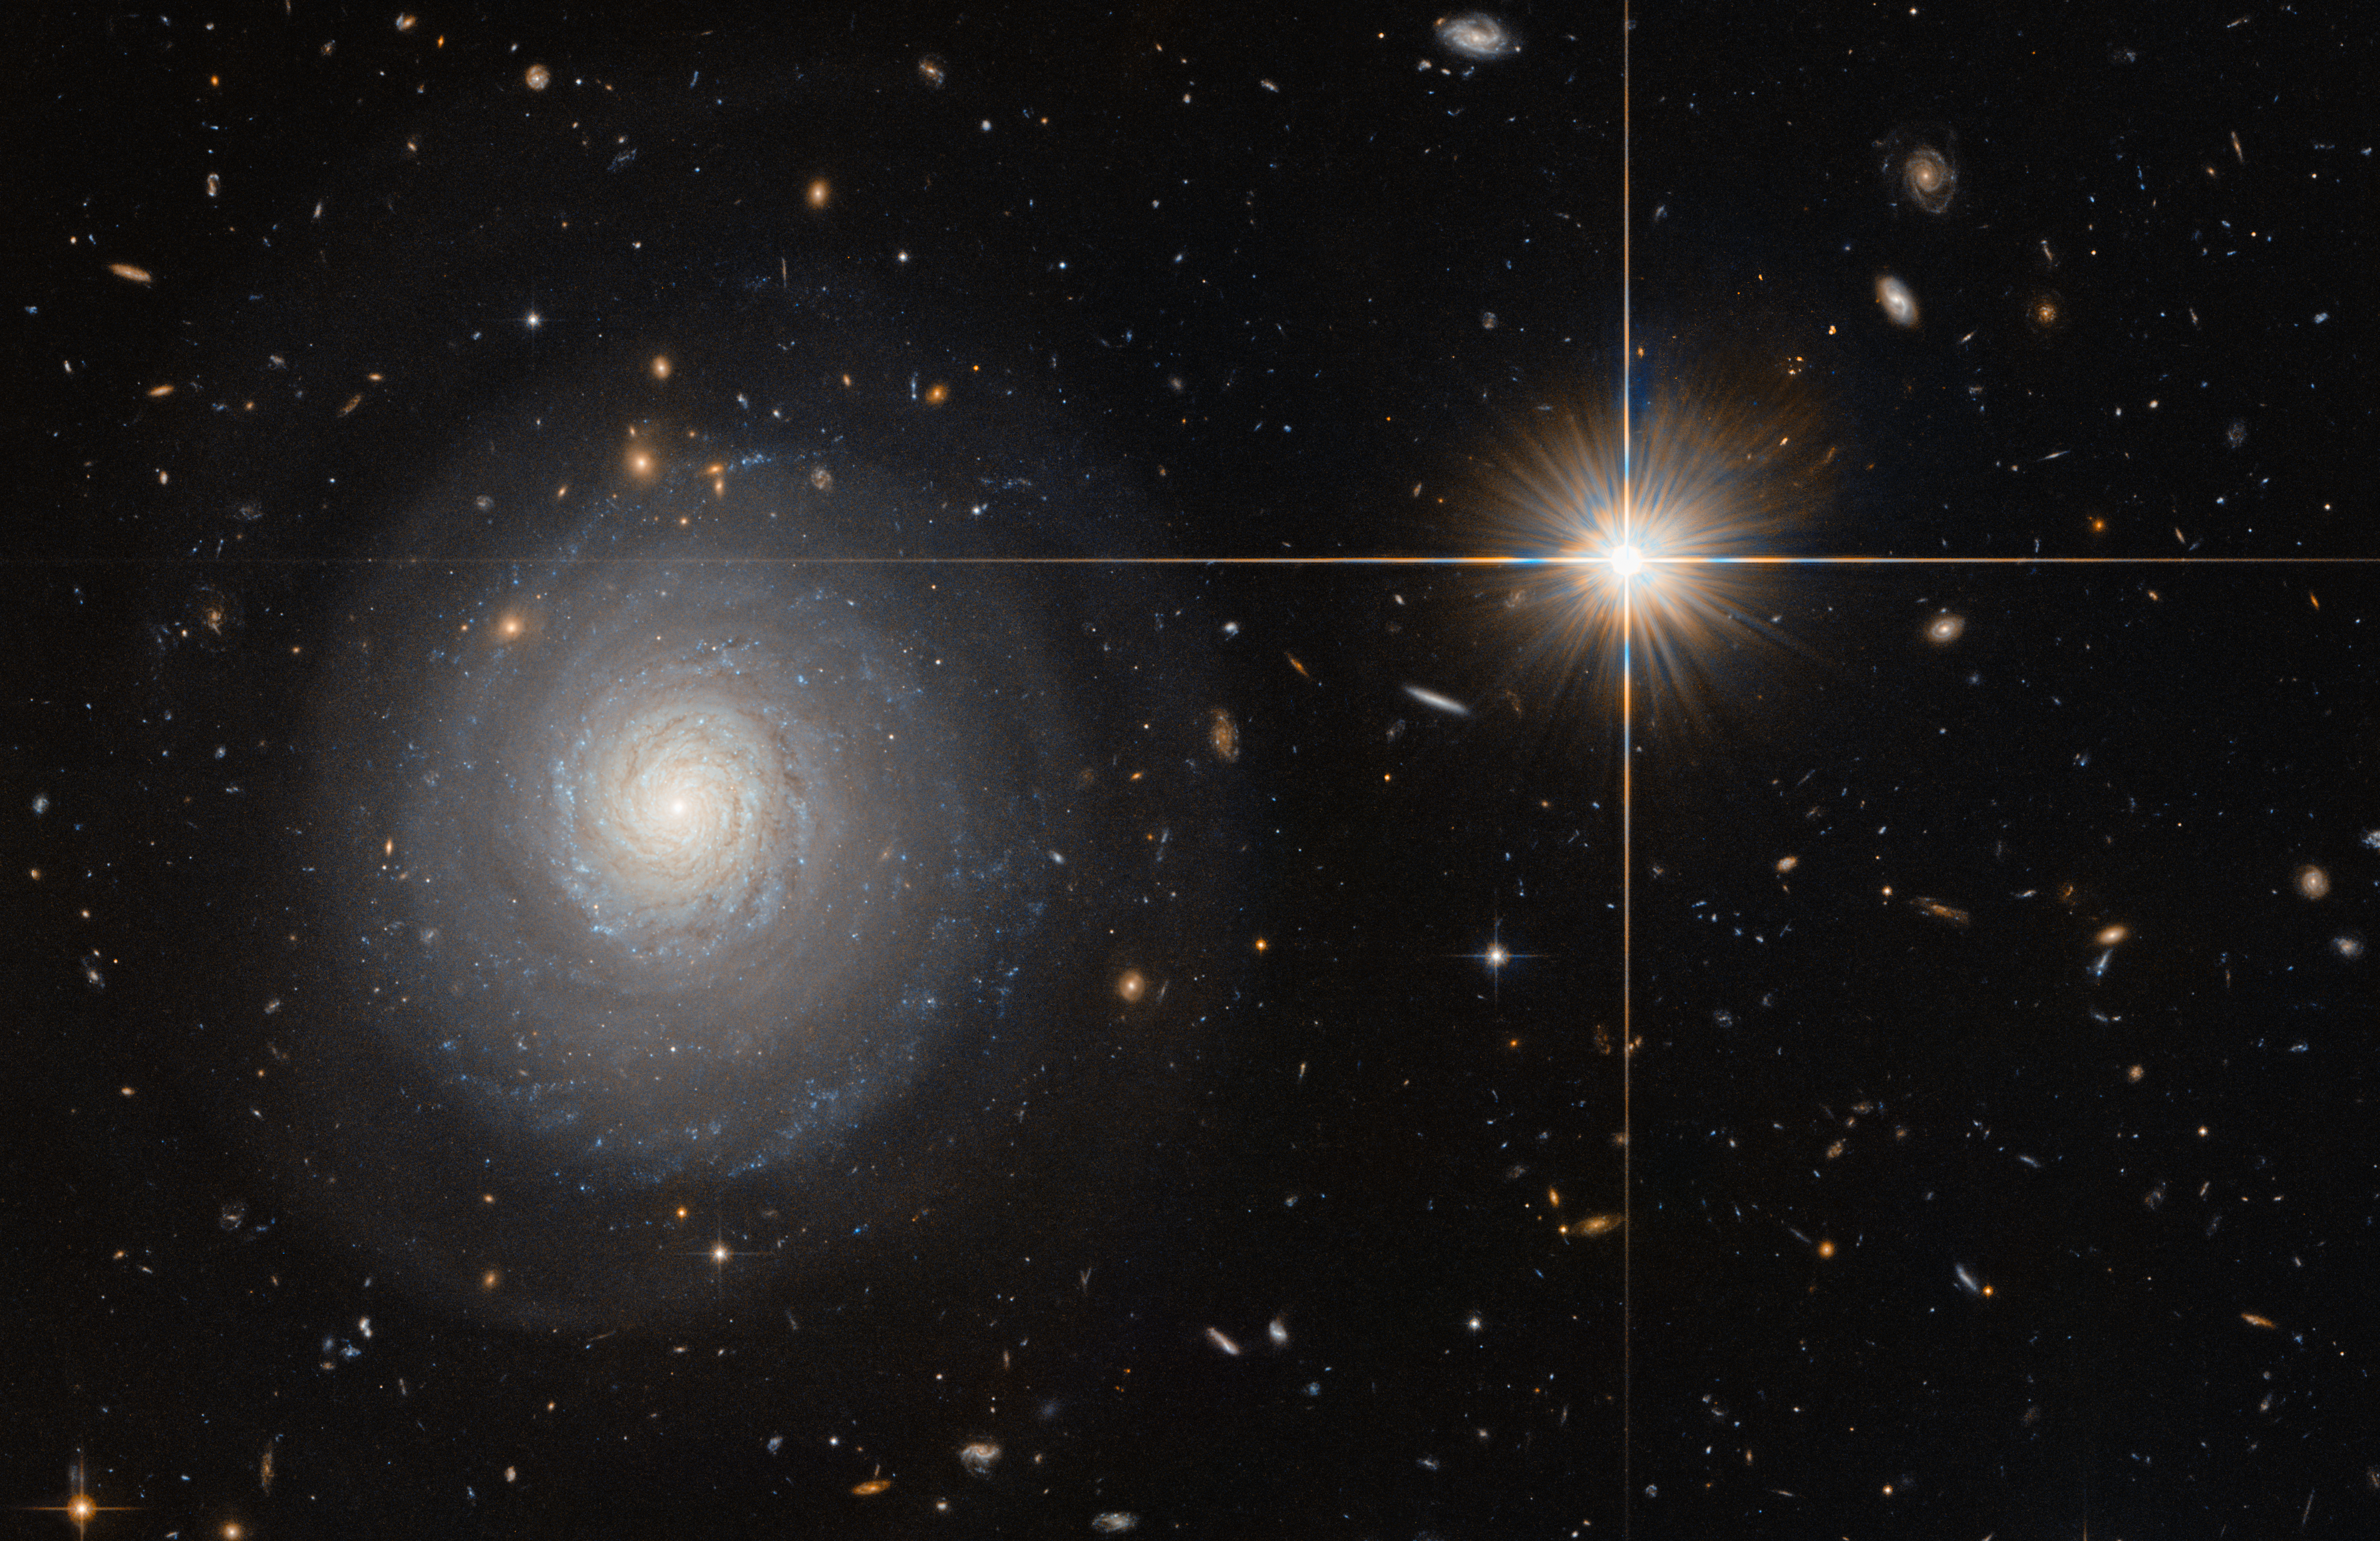

A lonely birthplace

This image was taken by the NASA/ESA Hubble Space Telescope’s Advanced Camera for Surveys (ACS), and shows a starburst galaxy named MCG+07-33-027. This galaxy lies some 300 million light-years away from us, and is currently experiencing an extraordinarily high rate of star formation — a starburst. Normal galaxies produce only a couple of new stars per year, but starburst galaxies can produce a hundred times more than that! As MCG+07-33-027 is seen face-on, the galaxy’s spiral arms and the bright star-forming regions within them are clearly visible and easy for astronomers to study.

In order to form newborn stars, the parent galaxy has to hold a large reservoir of gas, which is slowly depleted to spawn stars over time. For galaxies in a state of starburst, this intense period of star formation has to be triggered somehow — often this happens due to a collision with another galaxy. MCG+07-33-027, however, is special; while many galaxies are located within a large cluster of galaxies, MCG+07-33-027 is a field galaxy, which means it is rather isolated. Thus, the triggering of the starburst was most likely not due to a collision with a neighbouring or passing galaxy and astronomers are still speculating about the cause.

Credit: ESA/Hubble & NASA and N. Grogin (STScI)